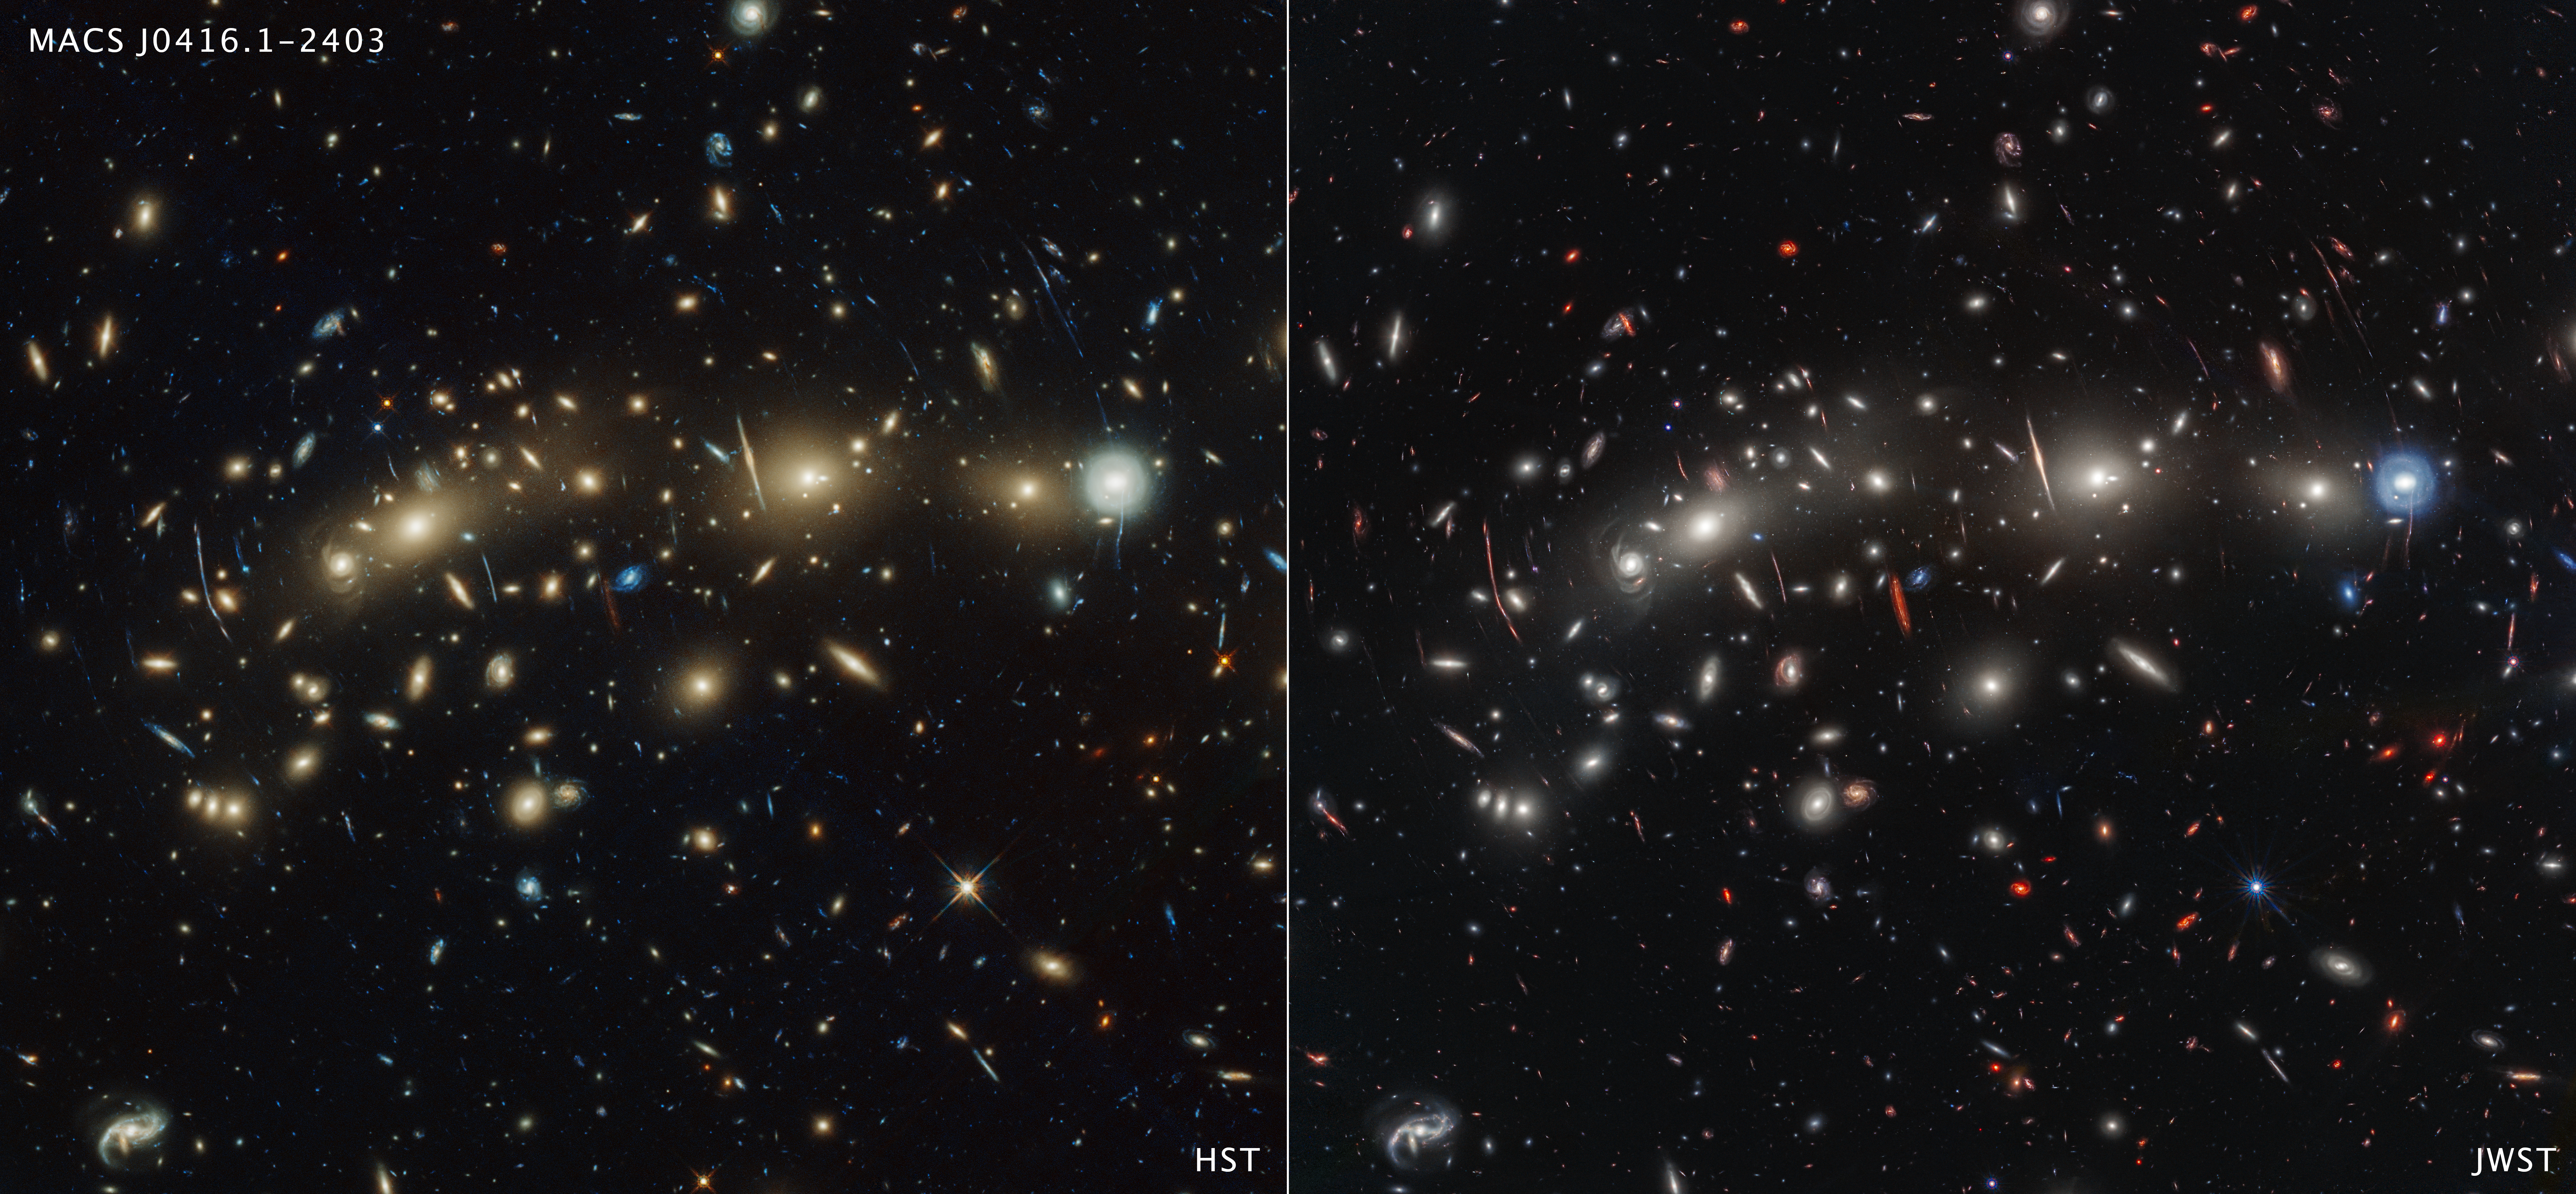

Galaxy cluster MACS1416 (Hubble and Webb images)

This side-by-side comparison of galaxy cluster MACS0416 as seen by the NASA/ESA Hubble Space Telescope in optical light (left) and the NASA/ESA/CSA James Webb Space Telescope in infrared light (right) reveals different details. Both images feature hundreds of galaxies, however the Webb image shows galaxies that are invisible or only barely visible in the Hubble image. This is because Webb’s infrared vision can detect galaxies too distant or dusty for Hubble to see. Light from distant galaxies is redshifted due to the expansion of the Universe.

Credit: NASA, ESA, CSA, STScI